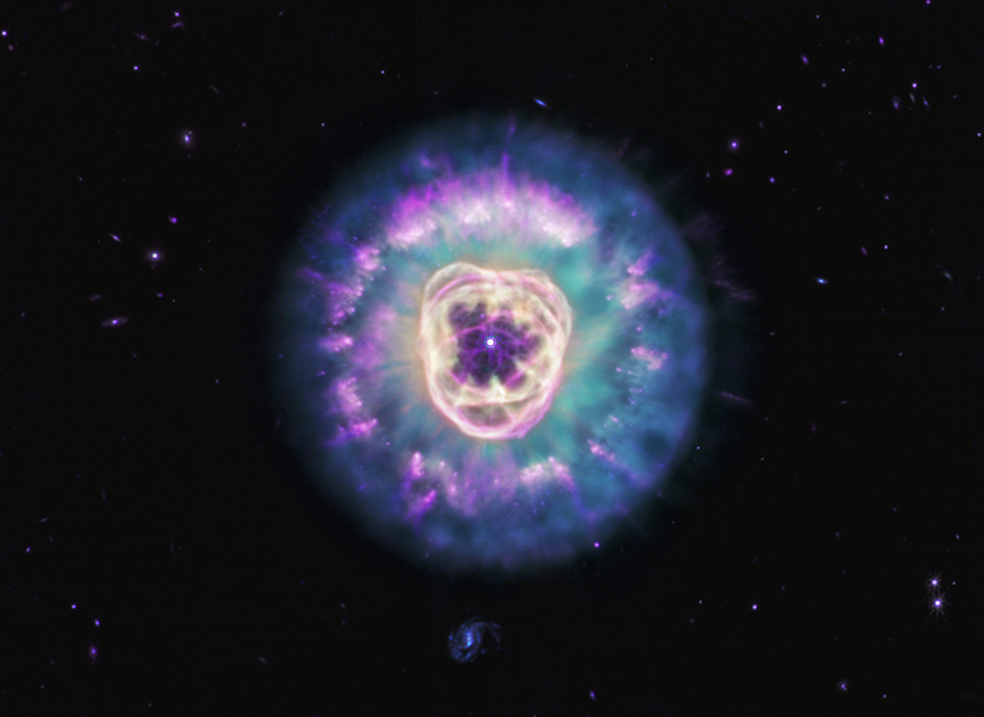

Lion Nebula (MIRI image)

The James Webb Space Telescope observed planetary nebula NGC 2392 in mid-infrared light, revealing the presence of dust and its varying structures within this tumultuous environment. Nicknamed the Lion Nebula due to its appearance, this collection of gas and dust is created and sculpted by the remains of a dying star, which is in the center and resembles the button nose of the lion.

While some dust is being destroyed by the bubble of ionized gas that forms the lion’s face, most of the gas is being ejected and migrating away from the star due to its radiation. In this image, cyan highlights the lion’s mane, which is the interior of a dust shell that is being illuminated by the central star. Within the mane, toward its edges, are purple clumps that look like they have cometary tails. These fluffy structures are also dust, which have managed to survive so far and protect the structures behind them.

Credit: NASA, ESA, CSA, STScI. Image Processing: A. Pagan (STScI)